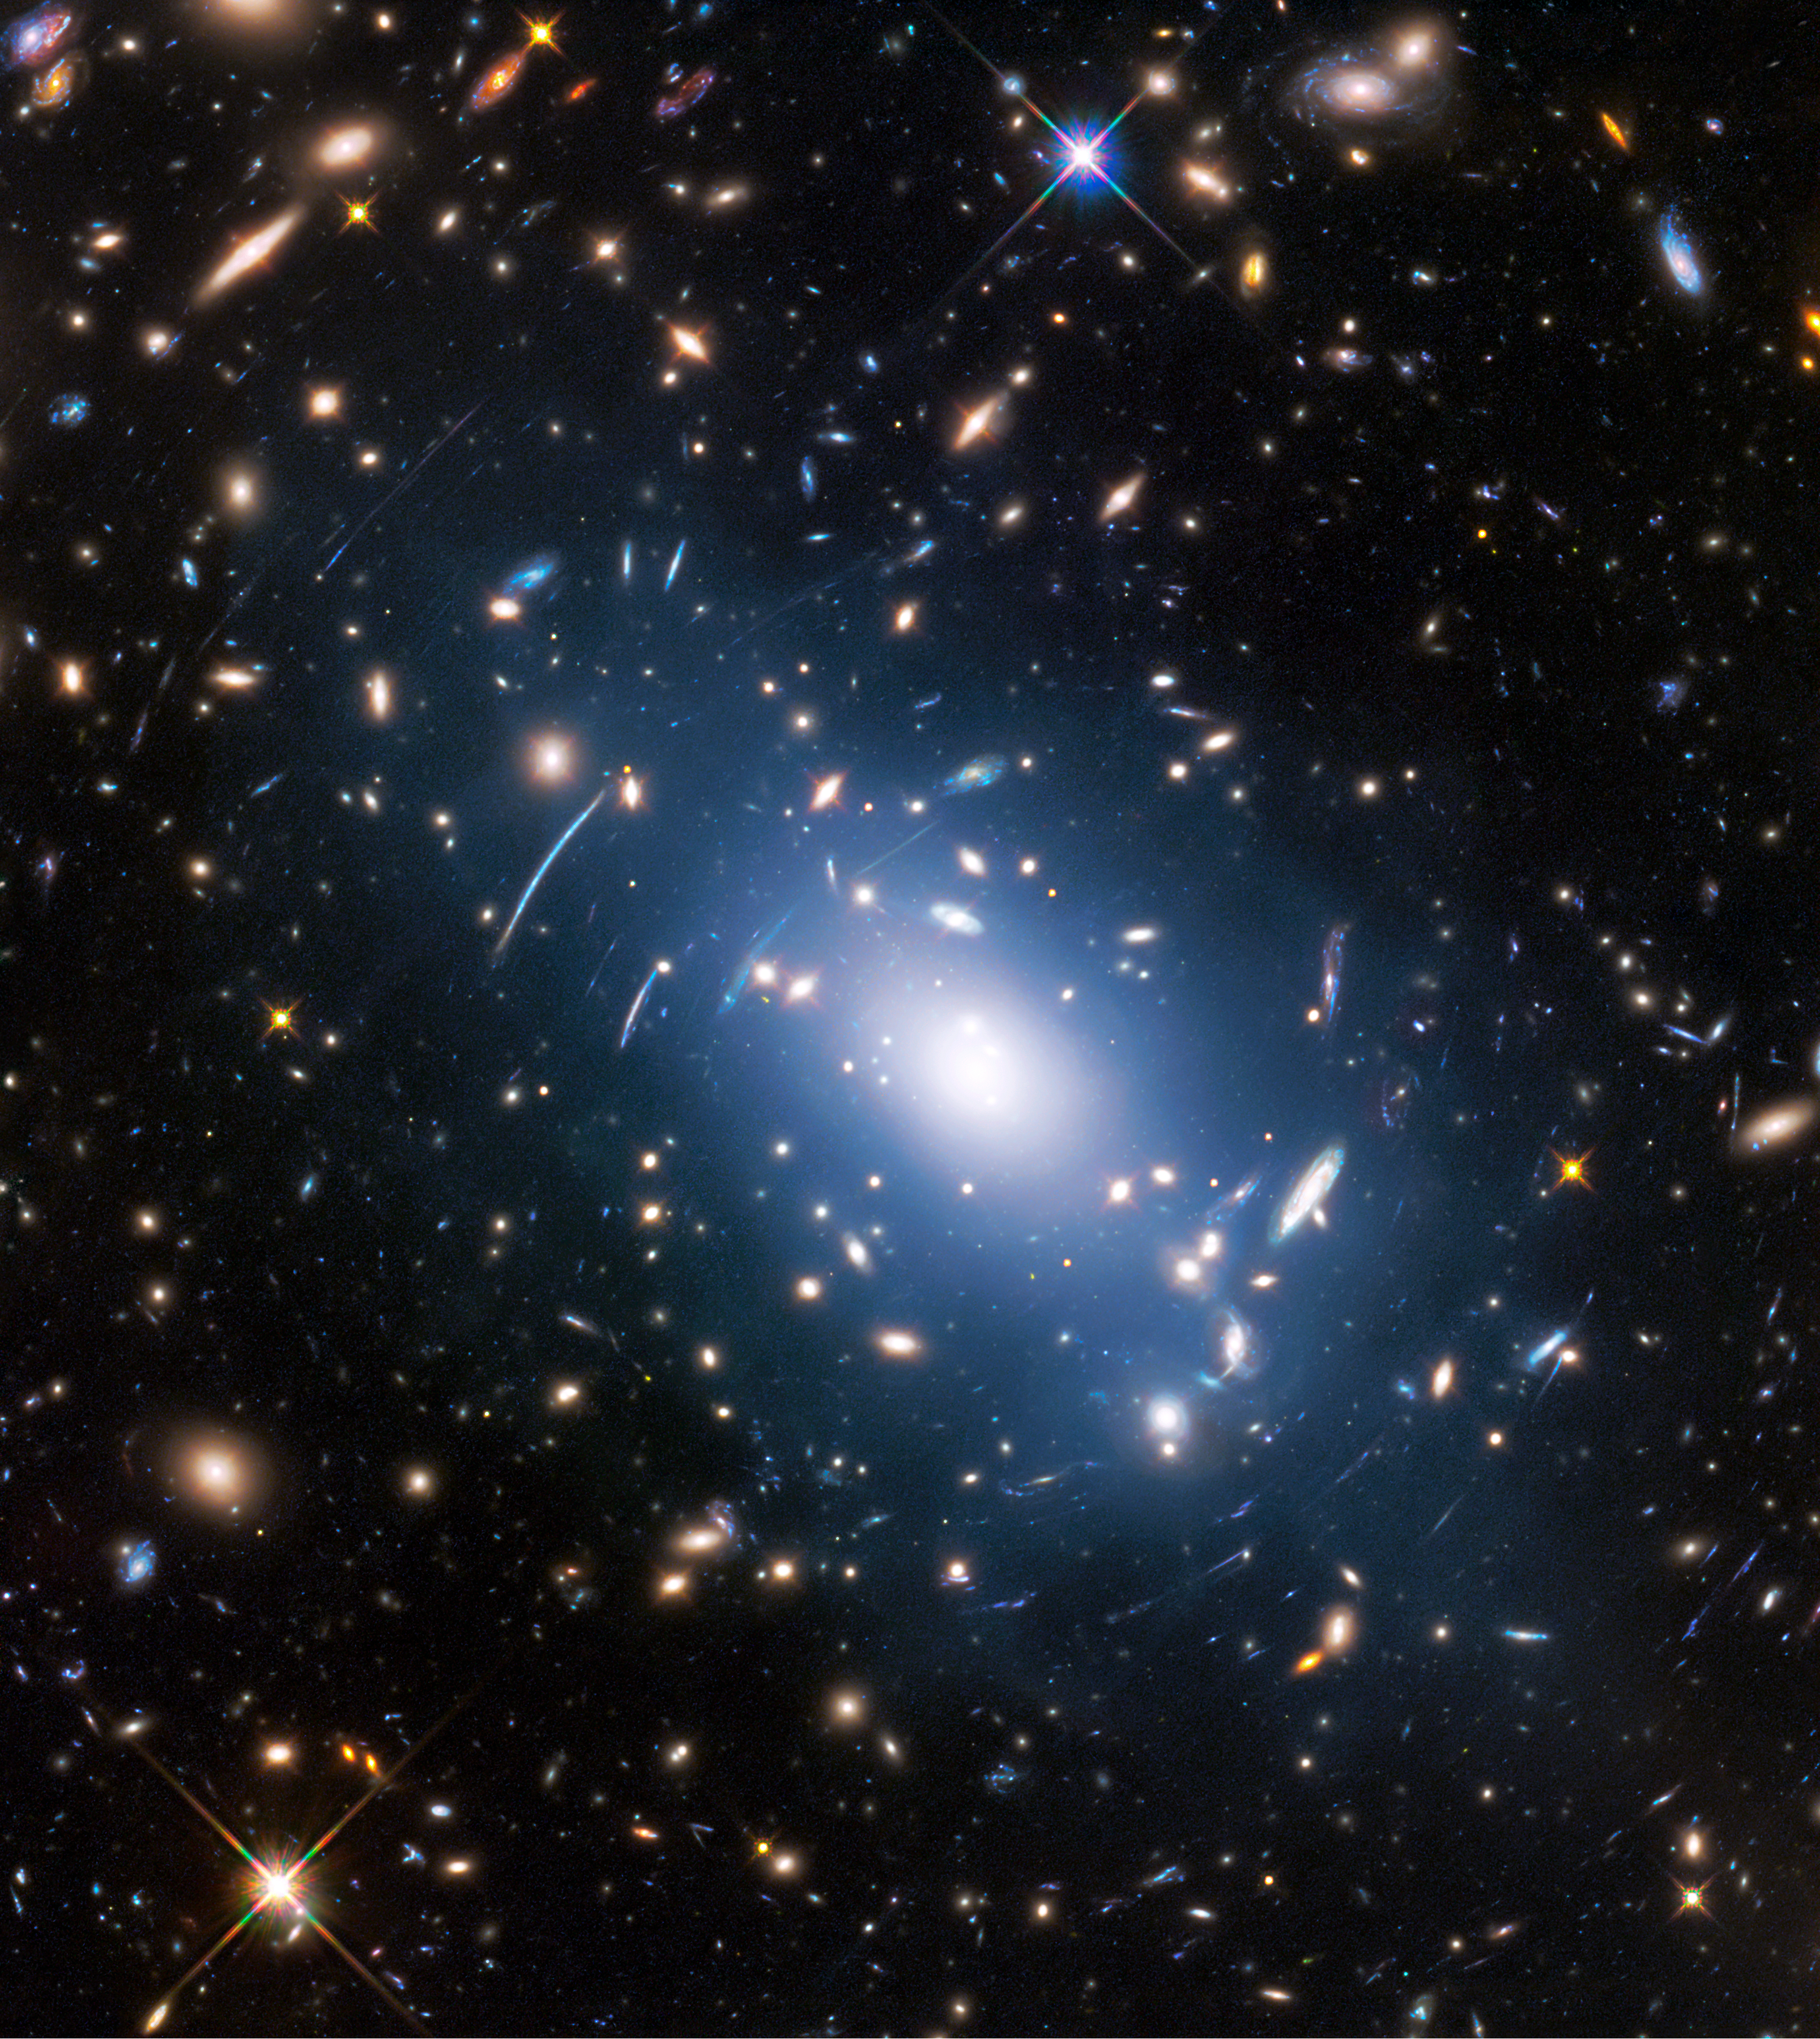

Intracluster light in Abell S1063

Abell S1063, a galaxy cluster, was observed by the NASA/ESA Hubble Space Telescope as part of the Frontier Fields programme. The huge mass of the cluster — containing both baryonic matter and dark matter — acts as cosmic magnification glass and deforms objects behind it. In the past astronomers used this gravitational lensing effect to calculate the distribution of dark matter in galaxy clusters.

A more accurate and faster way, however, is to study the intracluster light (visible in blue), which follows the distribution of dark matter.

Credit: NASA, ESA, and M. Montes (University of New South Wales, Sydney, Australia)